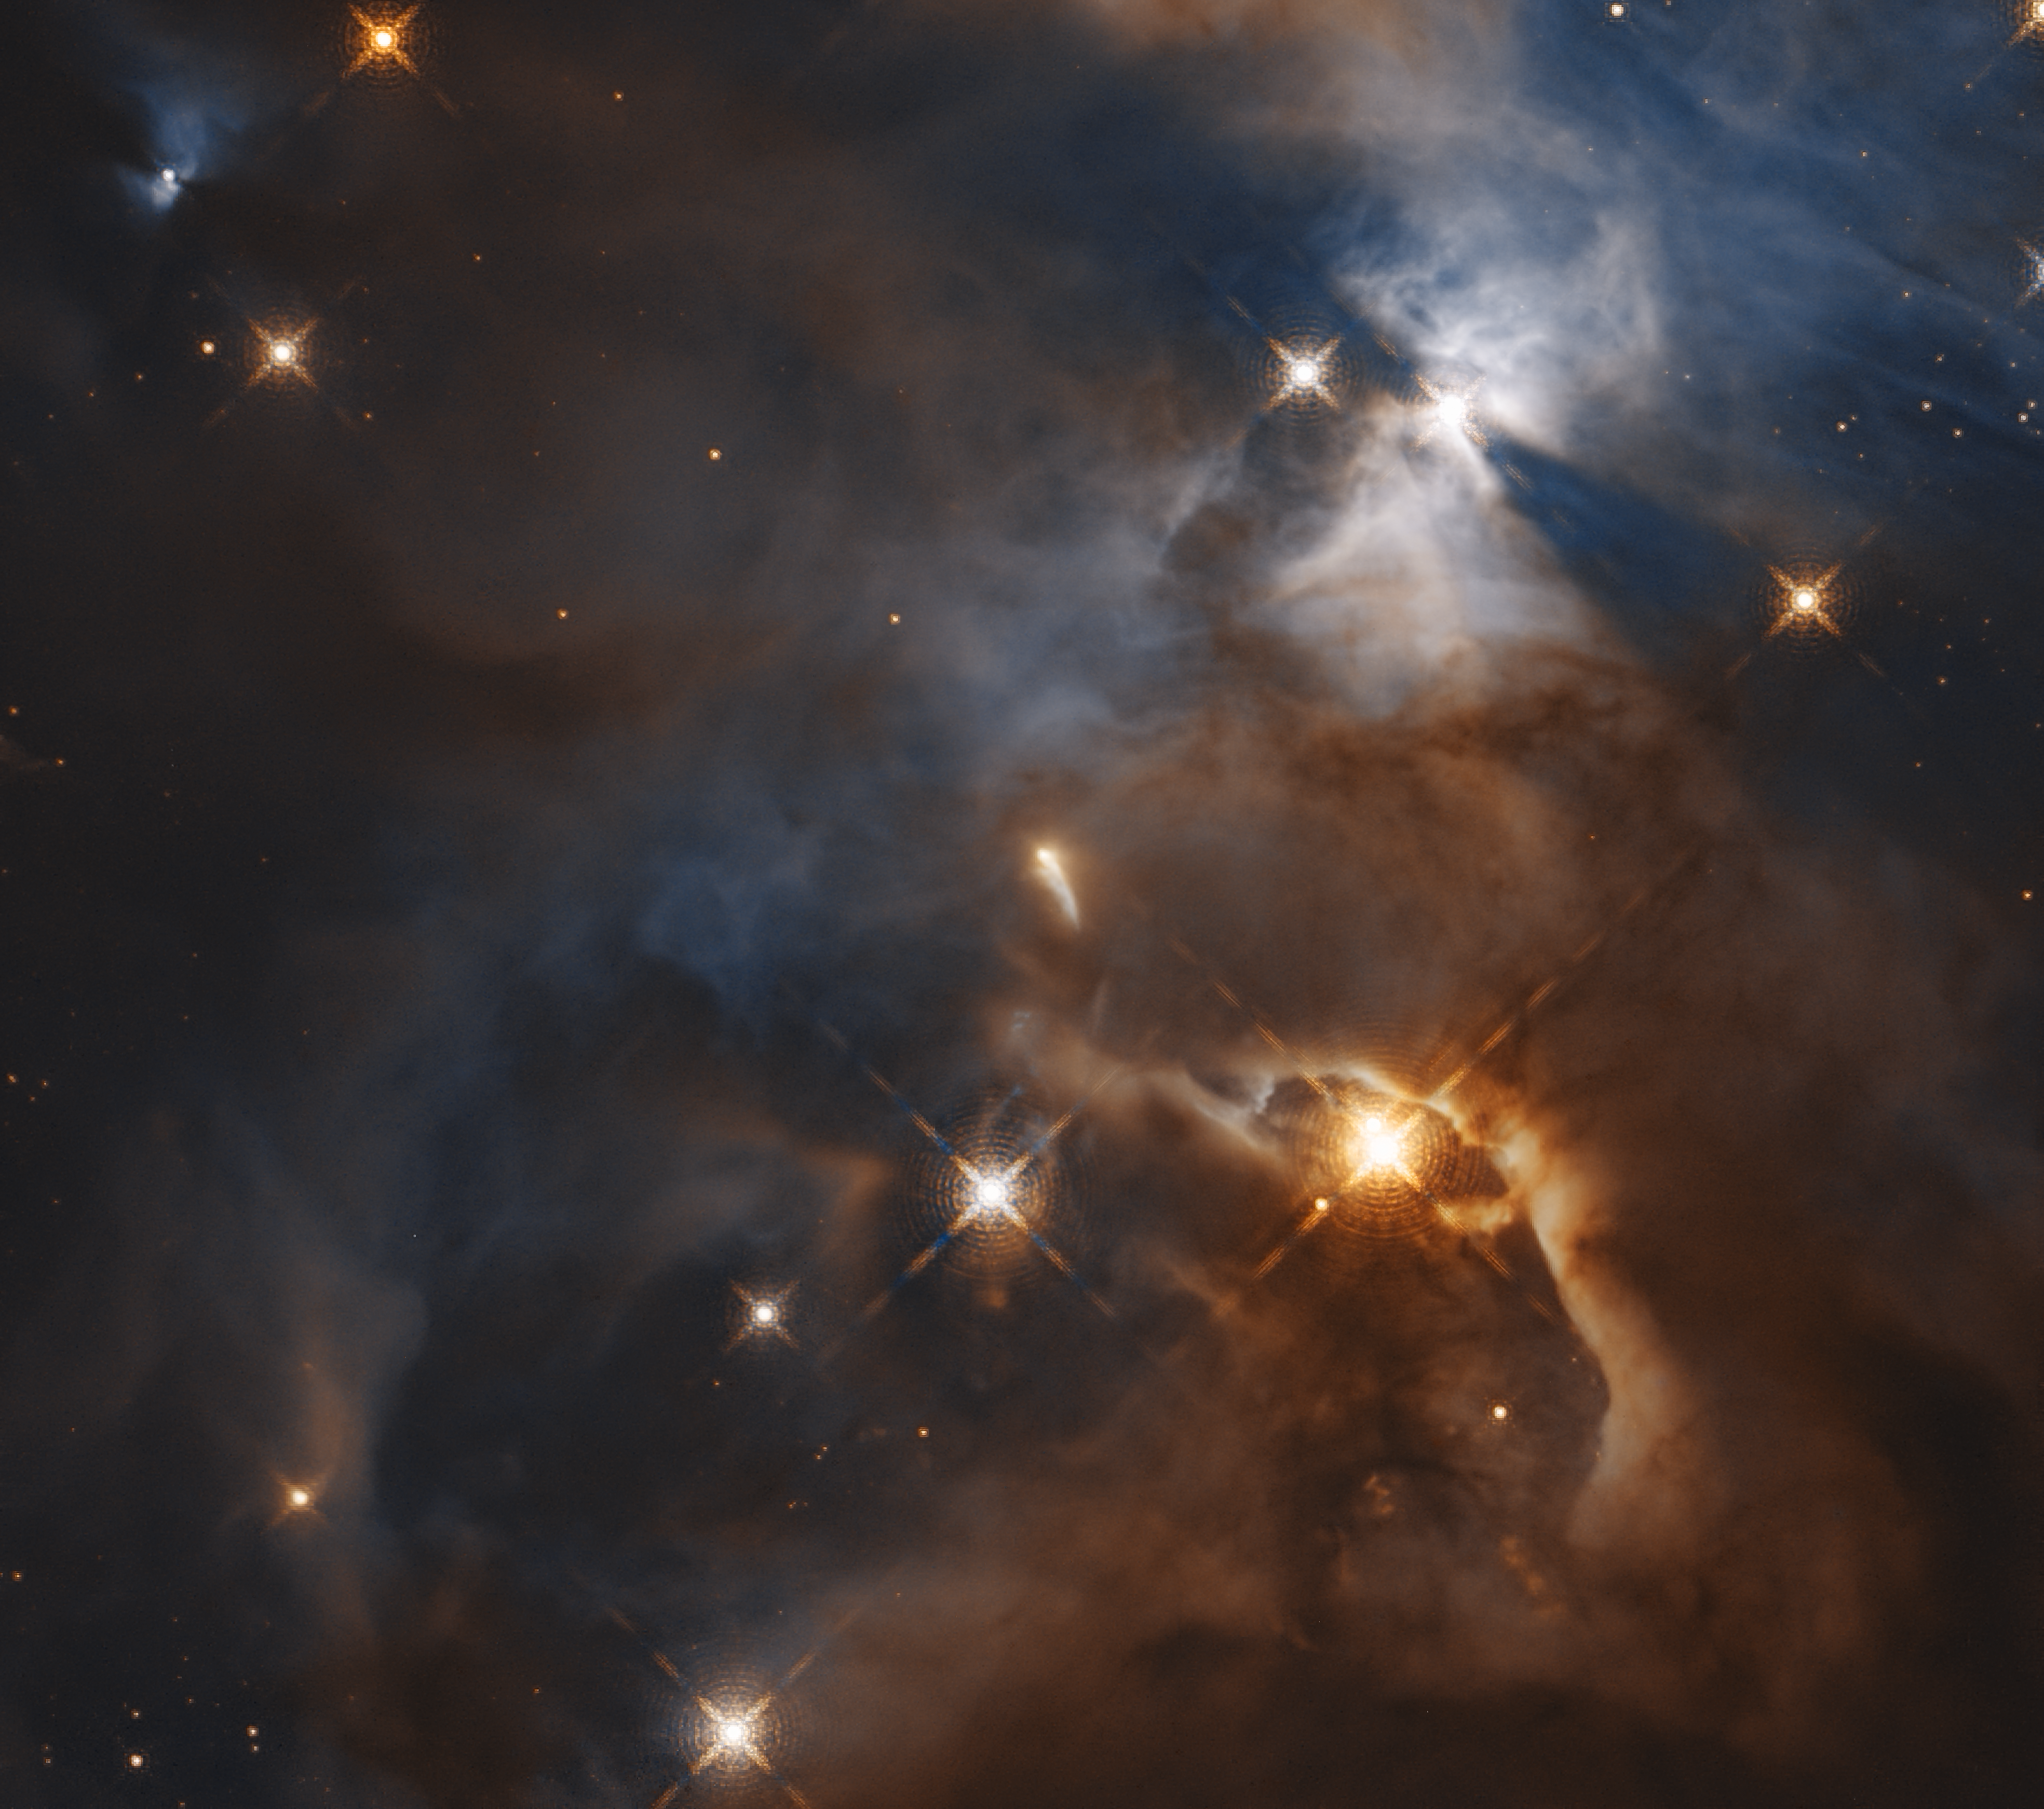

Bat Shadow (2018 Observation)

This image shows only the feature which was nicknamed the Bat Shadow. It is the shadow of a protoplanetary disc orbiting the star in the centre of the image.

Credit: NASA, ESA, K. Pontoppidan